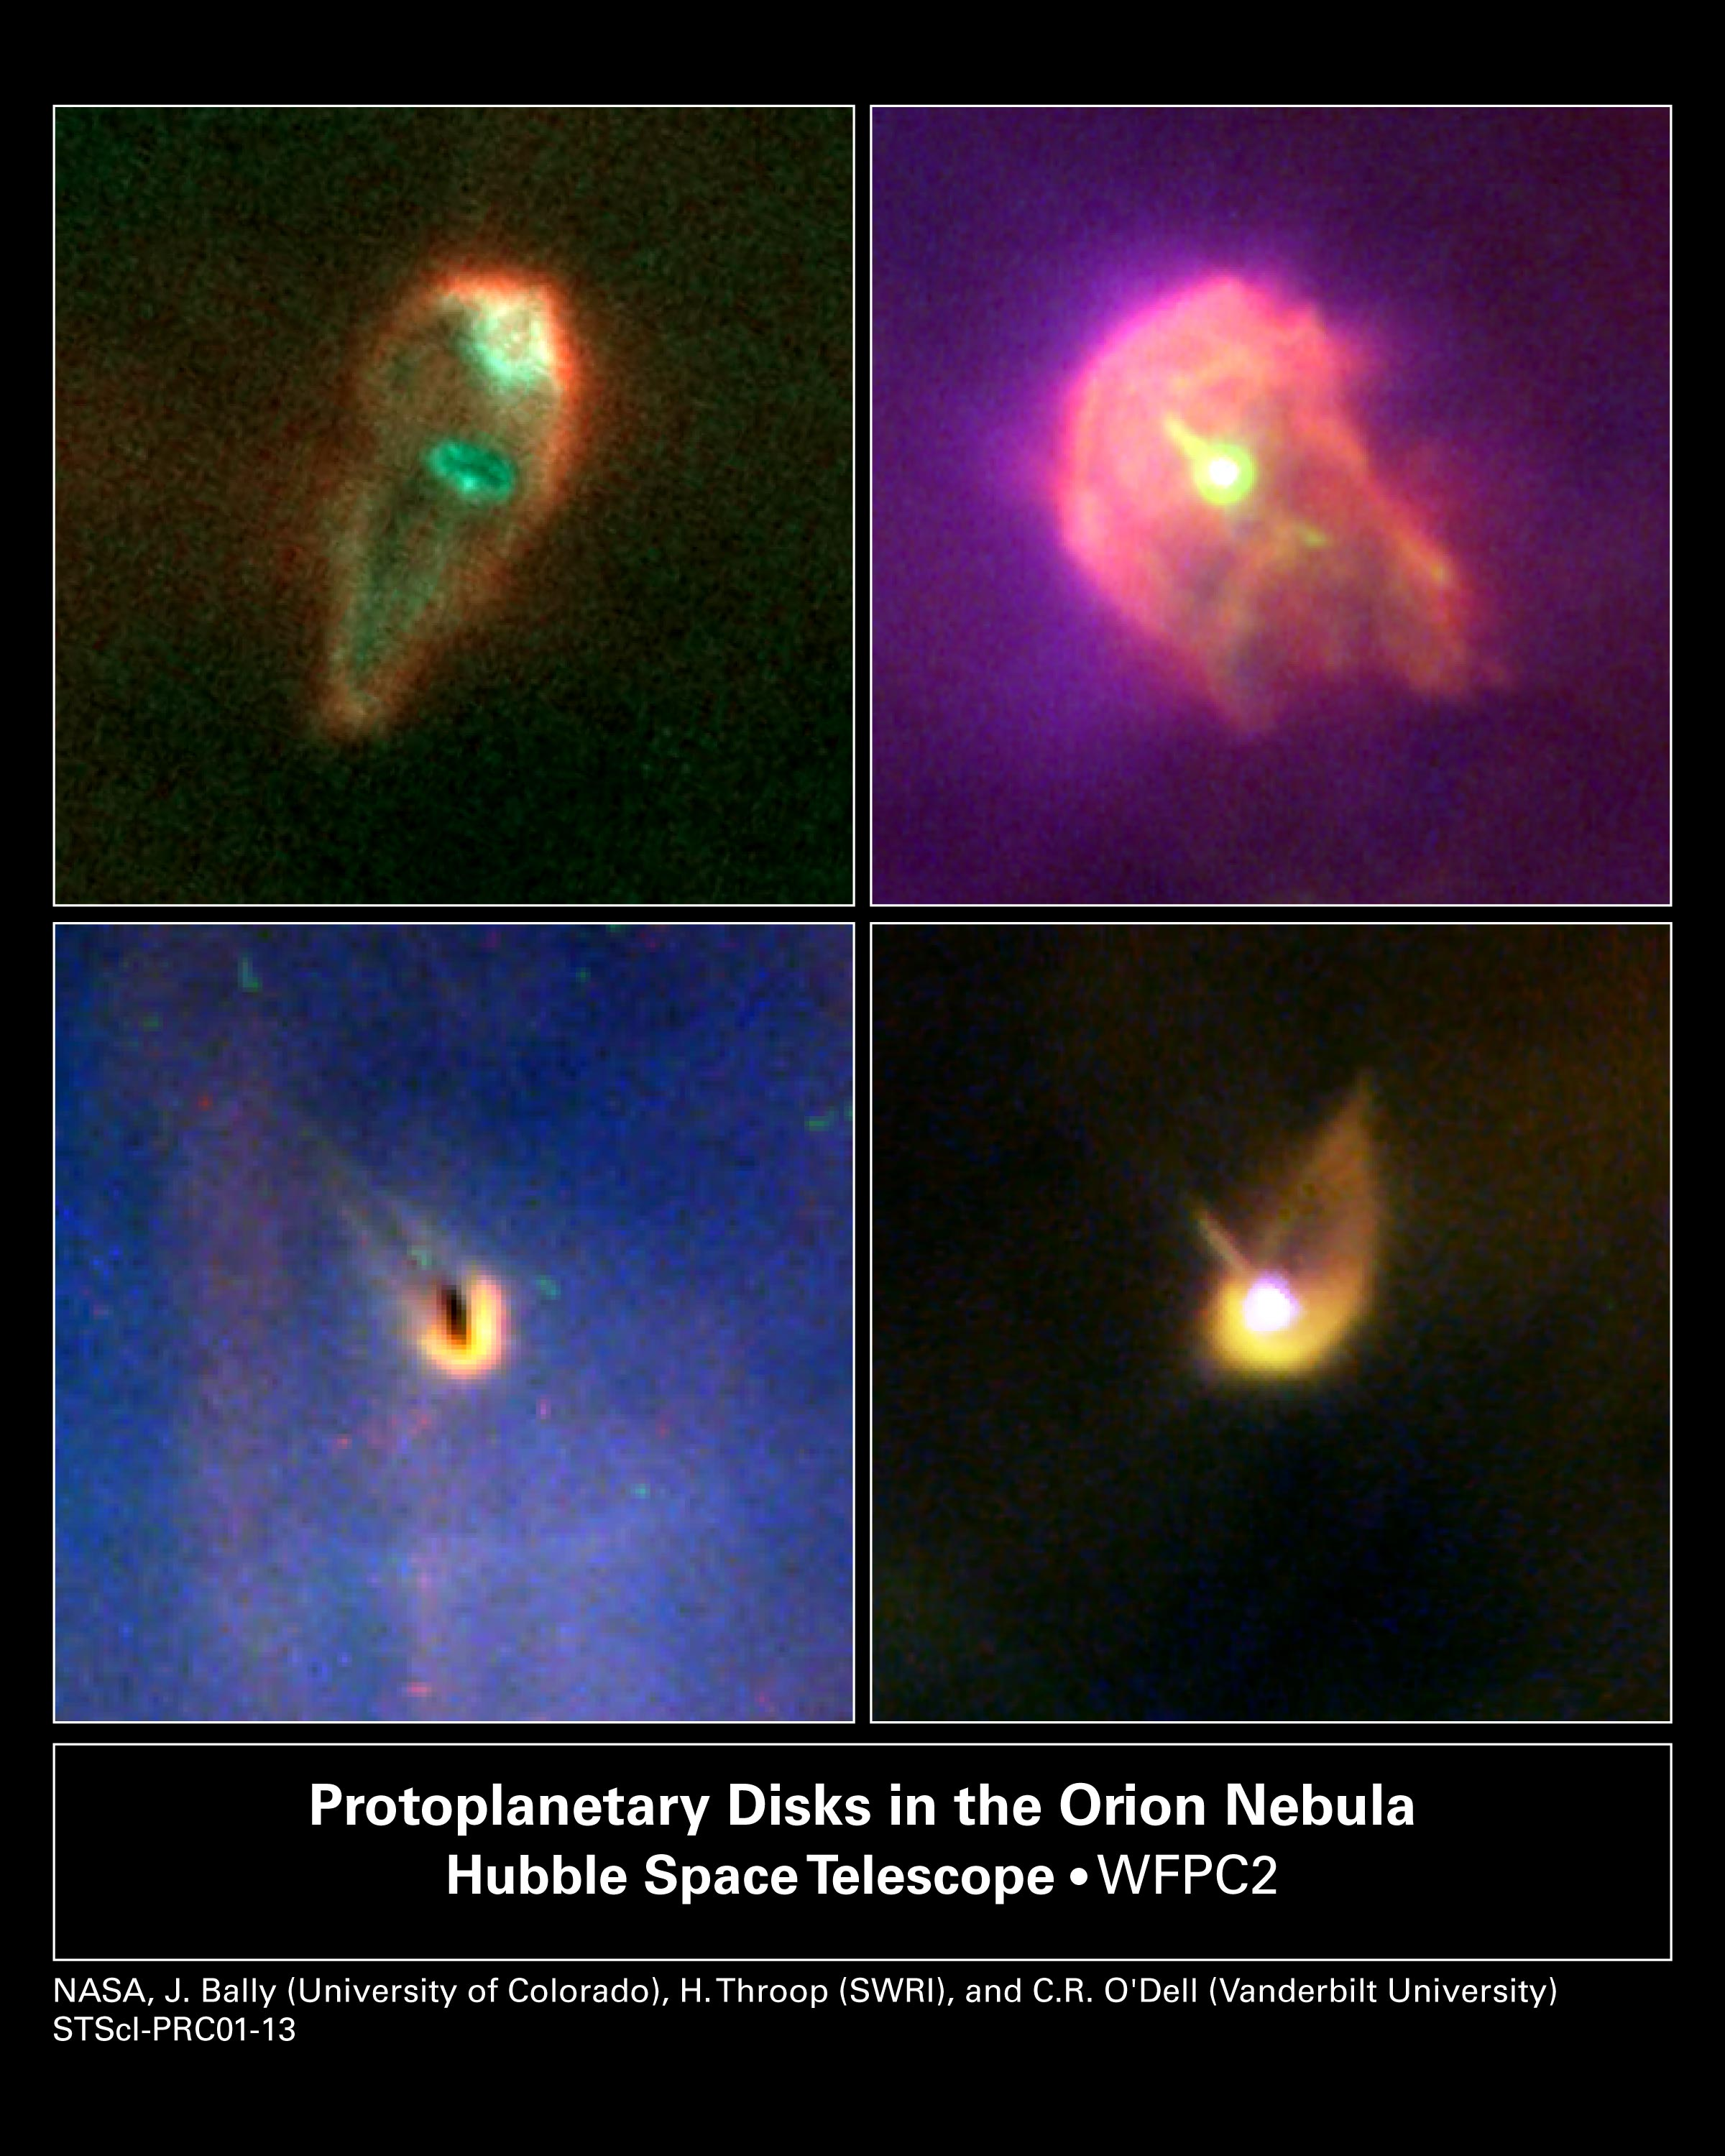

Protoplanetary Disks in the Orion Nebula

Planet formation is a hazardous process. These four snapshots, taken by the NASA/ESA Hubble Space Telescope, show dust disks around embryonic stars in the Orion Nebula being 'blowtorched' by a blistering flood of ultraviolet radiation from the region's brightest star. Within these disks are the seeds of planets. The doomed systems look like hapless comets, with wayward tails of gas boiling off the withering, pancake-shaped disks.

Credit: NASA/ESA, J. Bally (University of Colorado, Boulder, CO), H. Throop (Southwest Research Institute, Boulder, CO), C.R. O'Dell (Vanderbilt University, Nashville, TN)